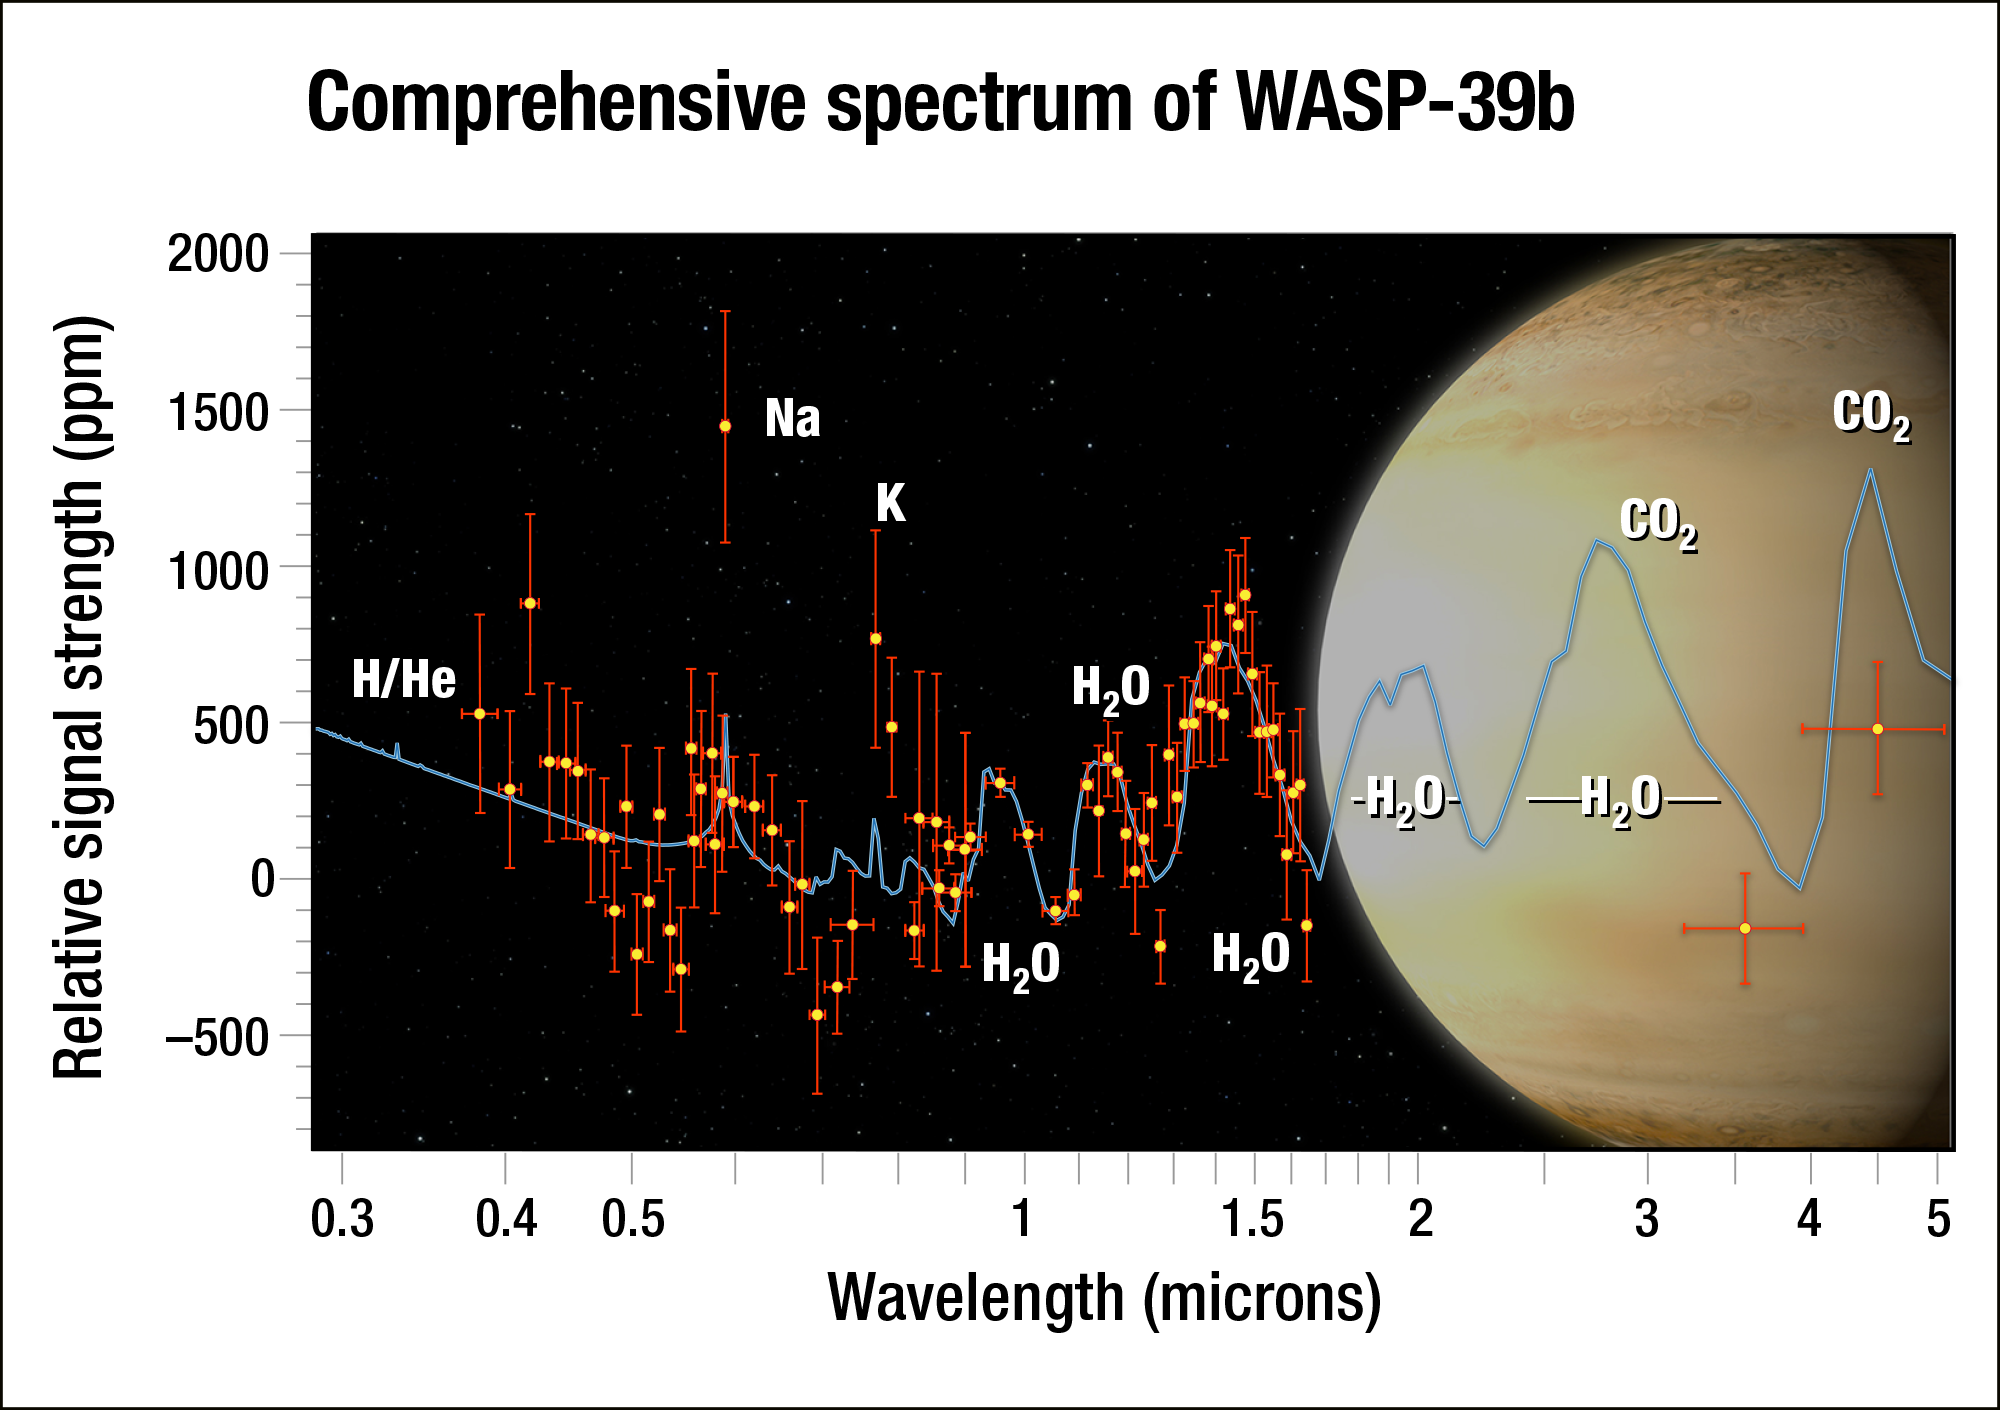

Comprehensive Spectrum of WASP-39b

Using the NASA/ESA Hubble Space Telescopes as well as data gathered by other telescopes in space and on the ground astronomers have analysed the atmosphere of the exoplanet WASP-39b. It is the most complete spectrum of an exoplanet’s atmosphere possible with present-day technology.

By dissecting starlight filtering through the planet’s atmosphere into its component colours, the team found clear evidence for water vapour. Although the researchers predicted they would see water, they were surprised by how much water they found — three times as much as Saturn has. This suggests that the planet formed farther out from the star, where it was bombarded by icy material.

Credit: NASA, ESA, G. Bacon and A. Feild (STScI), and H. Wakeford (STScI/Univ. of Exeter)